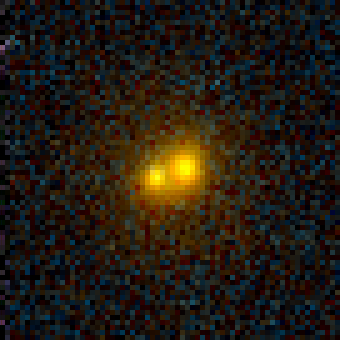

Galaxy Cluster MS1054-03

Exciting Hubble Space Telescope images of more than a dozen very distant colliding galaxies indicate that, at least in some cases, big massive galaxies form through collisions between smaller ones, in a 'generation after generation' never-ending story.

Credit: ESA/NASA, Pieter van Dokkum (University of Groningen/Leiden), Marijn Franx (University of Groningen/Leiden)